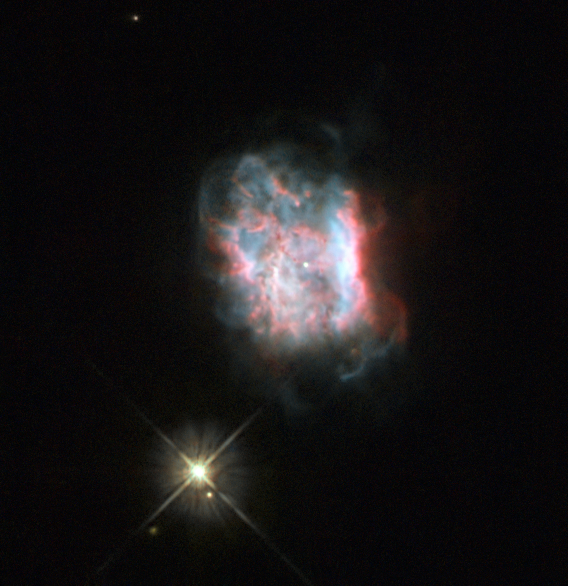

Masquerading as a double star

The object in this image is Jonckheere 900 or J 900, a planetary nebula — glowing shells of ionised gas pushed out by a dying star. Discovered in the early 1900s by astronomer Robert Jonckheere, the dusty nebula is small but fairly bright, with a relatively evenly spread central region surrounded by soft wispy edges.

Despite the clarity of this Hubble image, the two objects in the picture above can be confusing for observers. J 900’s nearby companion, a faint star in the constellation of Gemini, often causes problems for observers because it is so close to the nebula — when seeing conditions are bad, this star seems to merge into J 900, giving it an elongated appearance. Hubble’s position above the Earth’s atmosphere means that this is not an issue for the space telescope.

Astronomers have also mistakenly reported observations of a double star in place of these two objects, as the planetary nebula is quite small and compact.

J 900’s central star is only just visible in this image, and is very faint — fainter than the nebula’s neighbour. The nebula appears to display a bipolar structure, where there are two distinct lobes of material emanating from its centre, enclosed by a bright oval disc.

A version of this image was entered into the Hubble’s Hidden Treasures image processing competition by contestant Josh Barrington.

Credit: ESA/Hubble & NASA Acknowledgement: Josh Barrington